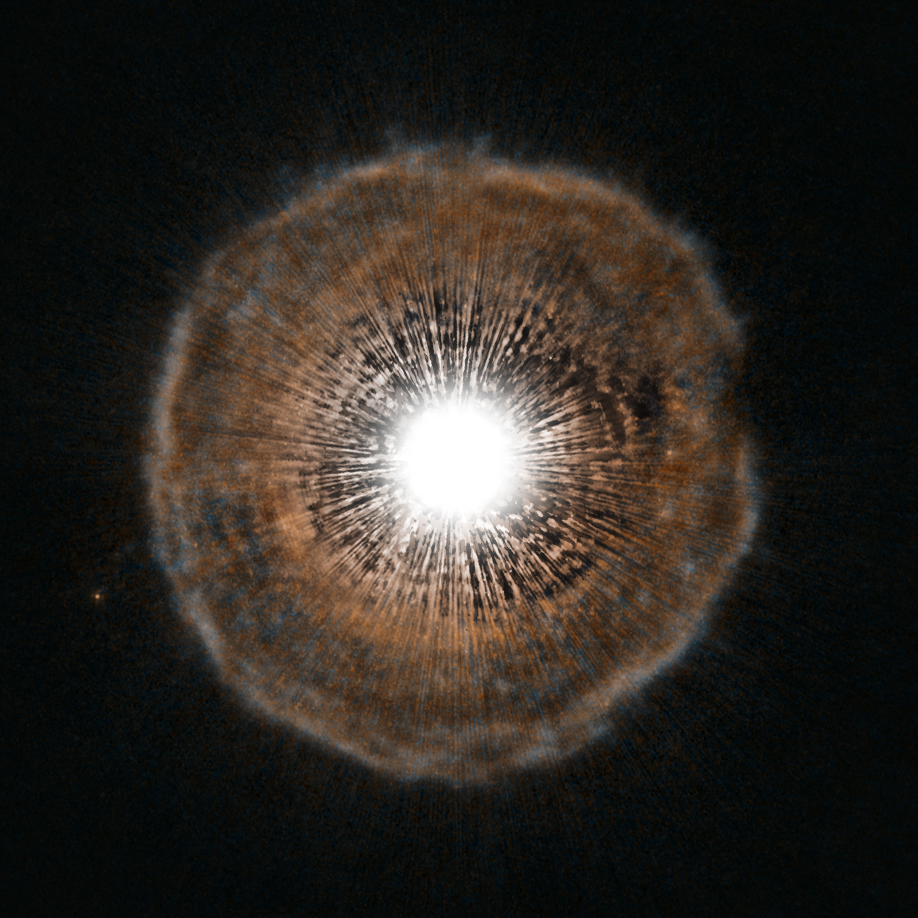

Red giant blows a bubble

A bright star is surrounded by a tenuous shell of gas in this unusual image from the NASA/ESA Hubble Space Telescope. U Camelopardalis, or U Cam for short, is a star nearing the end of its life. As it begins to run low on fuel, it is becoming unstable. Every few thousand years, it coughs out a nearly spherical shell of gas as a layer of helium around its core begins to fuse. The gas ejected in the star’s latest eruption is clearly visible in this picture as a faint bubble of gas surrounding the star.

U Cam is an example of a carbon star. This is a rare type of star whose atmosphere contains more carbon than oxygen. Due to its low surface gravity, typically as much as half of the total mass of a carbon star may be lost by way of powerful stellar winds.

Located in the constellation of Camelopardalis (The Giraffe), near the North Celestial Pole, U Cam itself is actually much smaller than it appears in Hubble’s picture. In fact, the star would easily fit within a single pixel at the centre of the image. Its brightness, however, is enough to overwhelm the capability of Hubble’s Advanced Camera for Surveys making the star look much bigger than it really is.

The shell of gas, which is both much larger and much fainter than its parent star, is visible in intricate detail in Hubble’s portrait. While phenomena that occur at the ends of stars’ lives are often quite irregular and unstable (see for example Hubble’s images of Eta Carinae, potw1208a), the shell of gas expelled from U Cam is almost perfectly spherical.

The image was produced with the High Resolution Channel of the Advanced Camera for Surveys.

Credit: ESA/Hubble, NASA and H. Olofsson (Onsala Space Observatory)